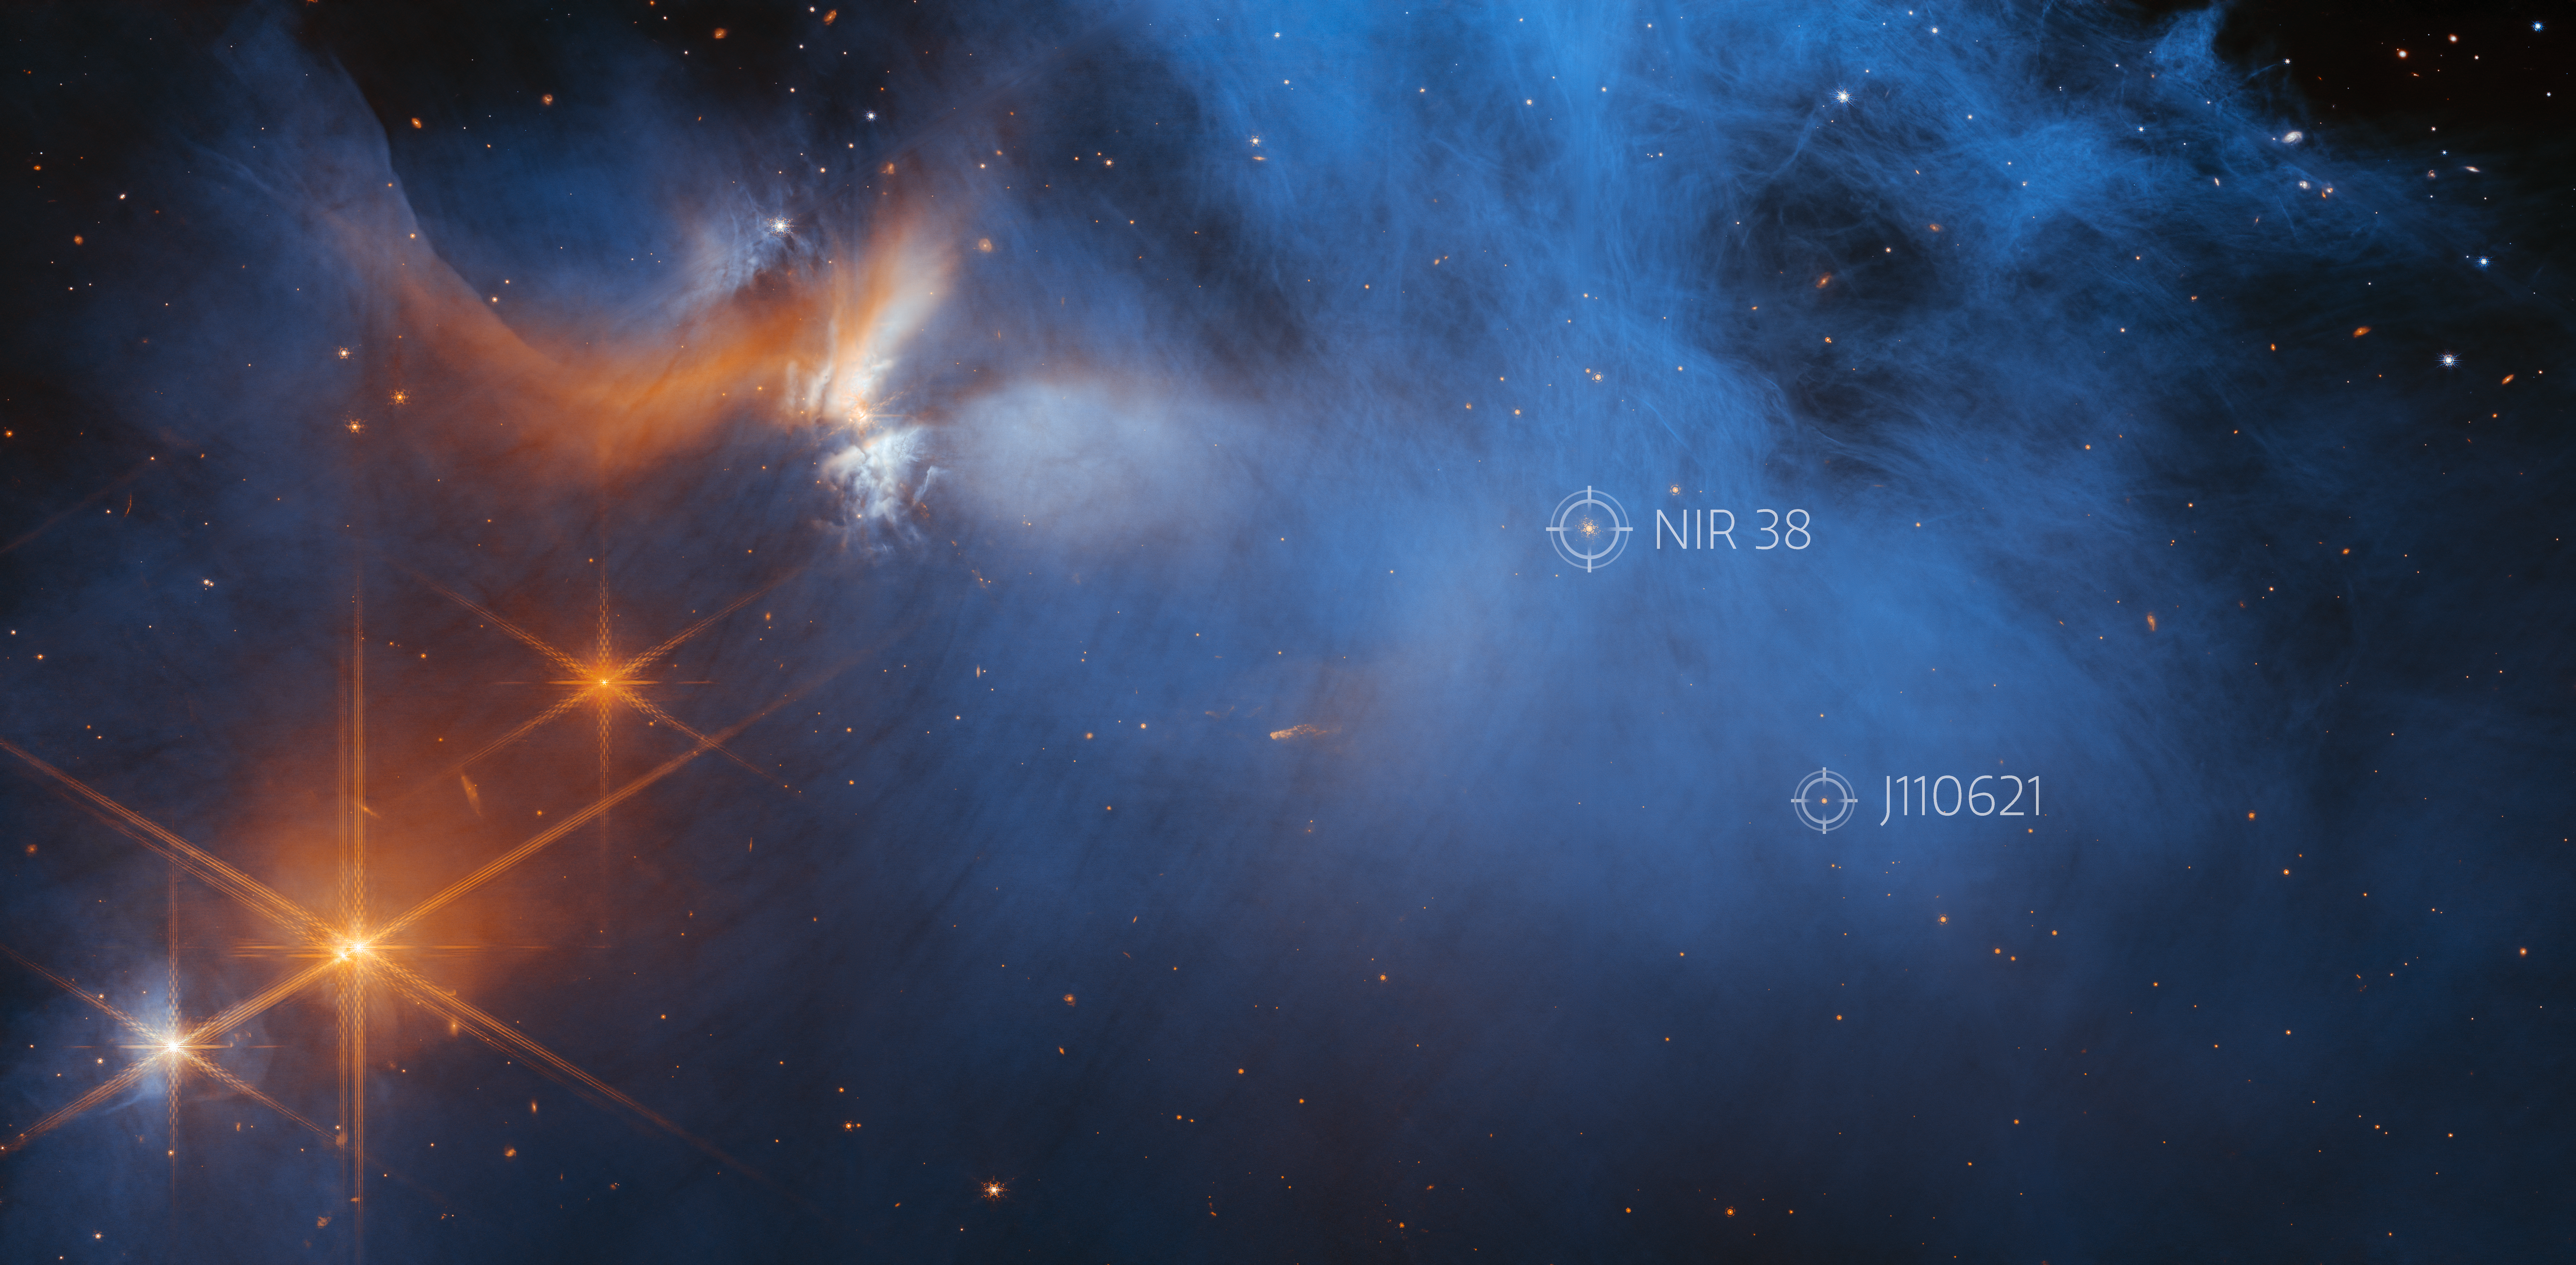

Webb’s View of the Molecular Cloud Chameleon I (Annotated)

This image by the NASA/ESA/CSA James Webb Space Telescope’s Near-InfraRed Camera (NIRCam) features the central region of the Chameleon I dark molecular cloud, which resides 630 light years away. The cold, wispy cloud material (blue, centre) is illuminated in the infrared by the glow of the young, outflowing protostar Ced 110 IRS 4 (orange, upper left). The light from numerous background stars, seen as orange dots behind the cloud, can be used to detect ices in the cloud, which absorb the starlight passing through them.

An international team of astronomers has reported the discovery of diverse ices in the darkest, coldest regions of a molecular cloud measured to date by studying this region. This result allows astronomers to examine the simple icy molecules that will be incorporated into future exoplanets, while opening a new window on the origin of more complex molecules that are the first step in the creation of the building blocks of life.

The two background stars used in this study, NIR38 and J110621 are denoted on the image in white.

Credit: NASA, ESA, CSA, and M. Zamani (ESA/Webb); Science: F. Sun (Steward Observatory), Z. Smith (Open University), and the Ice Age ERS Team.